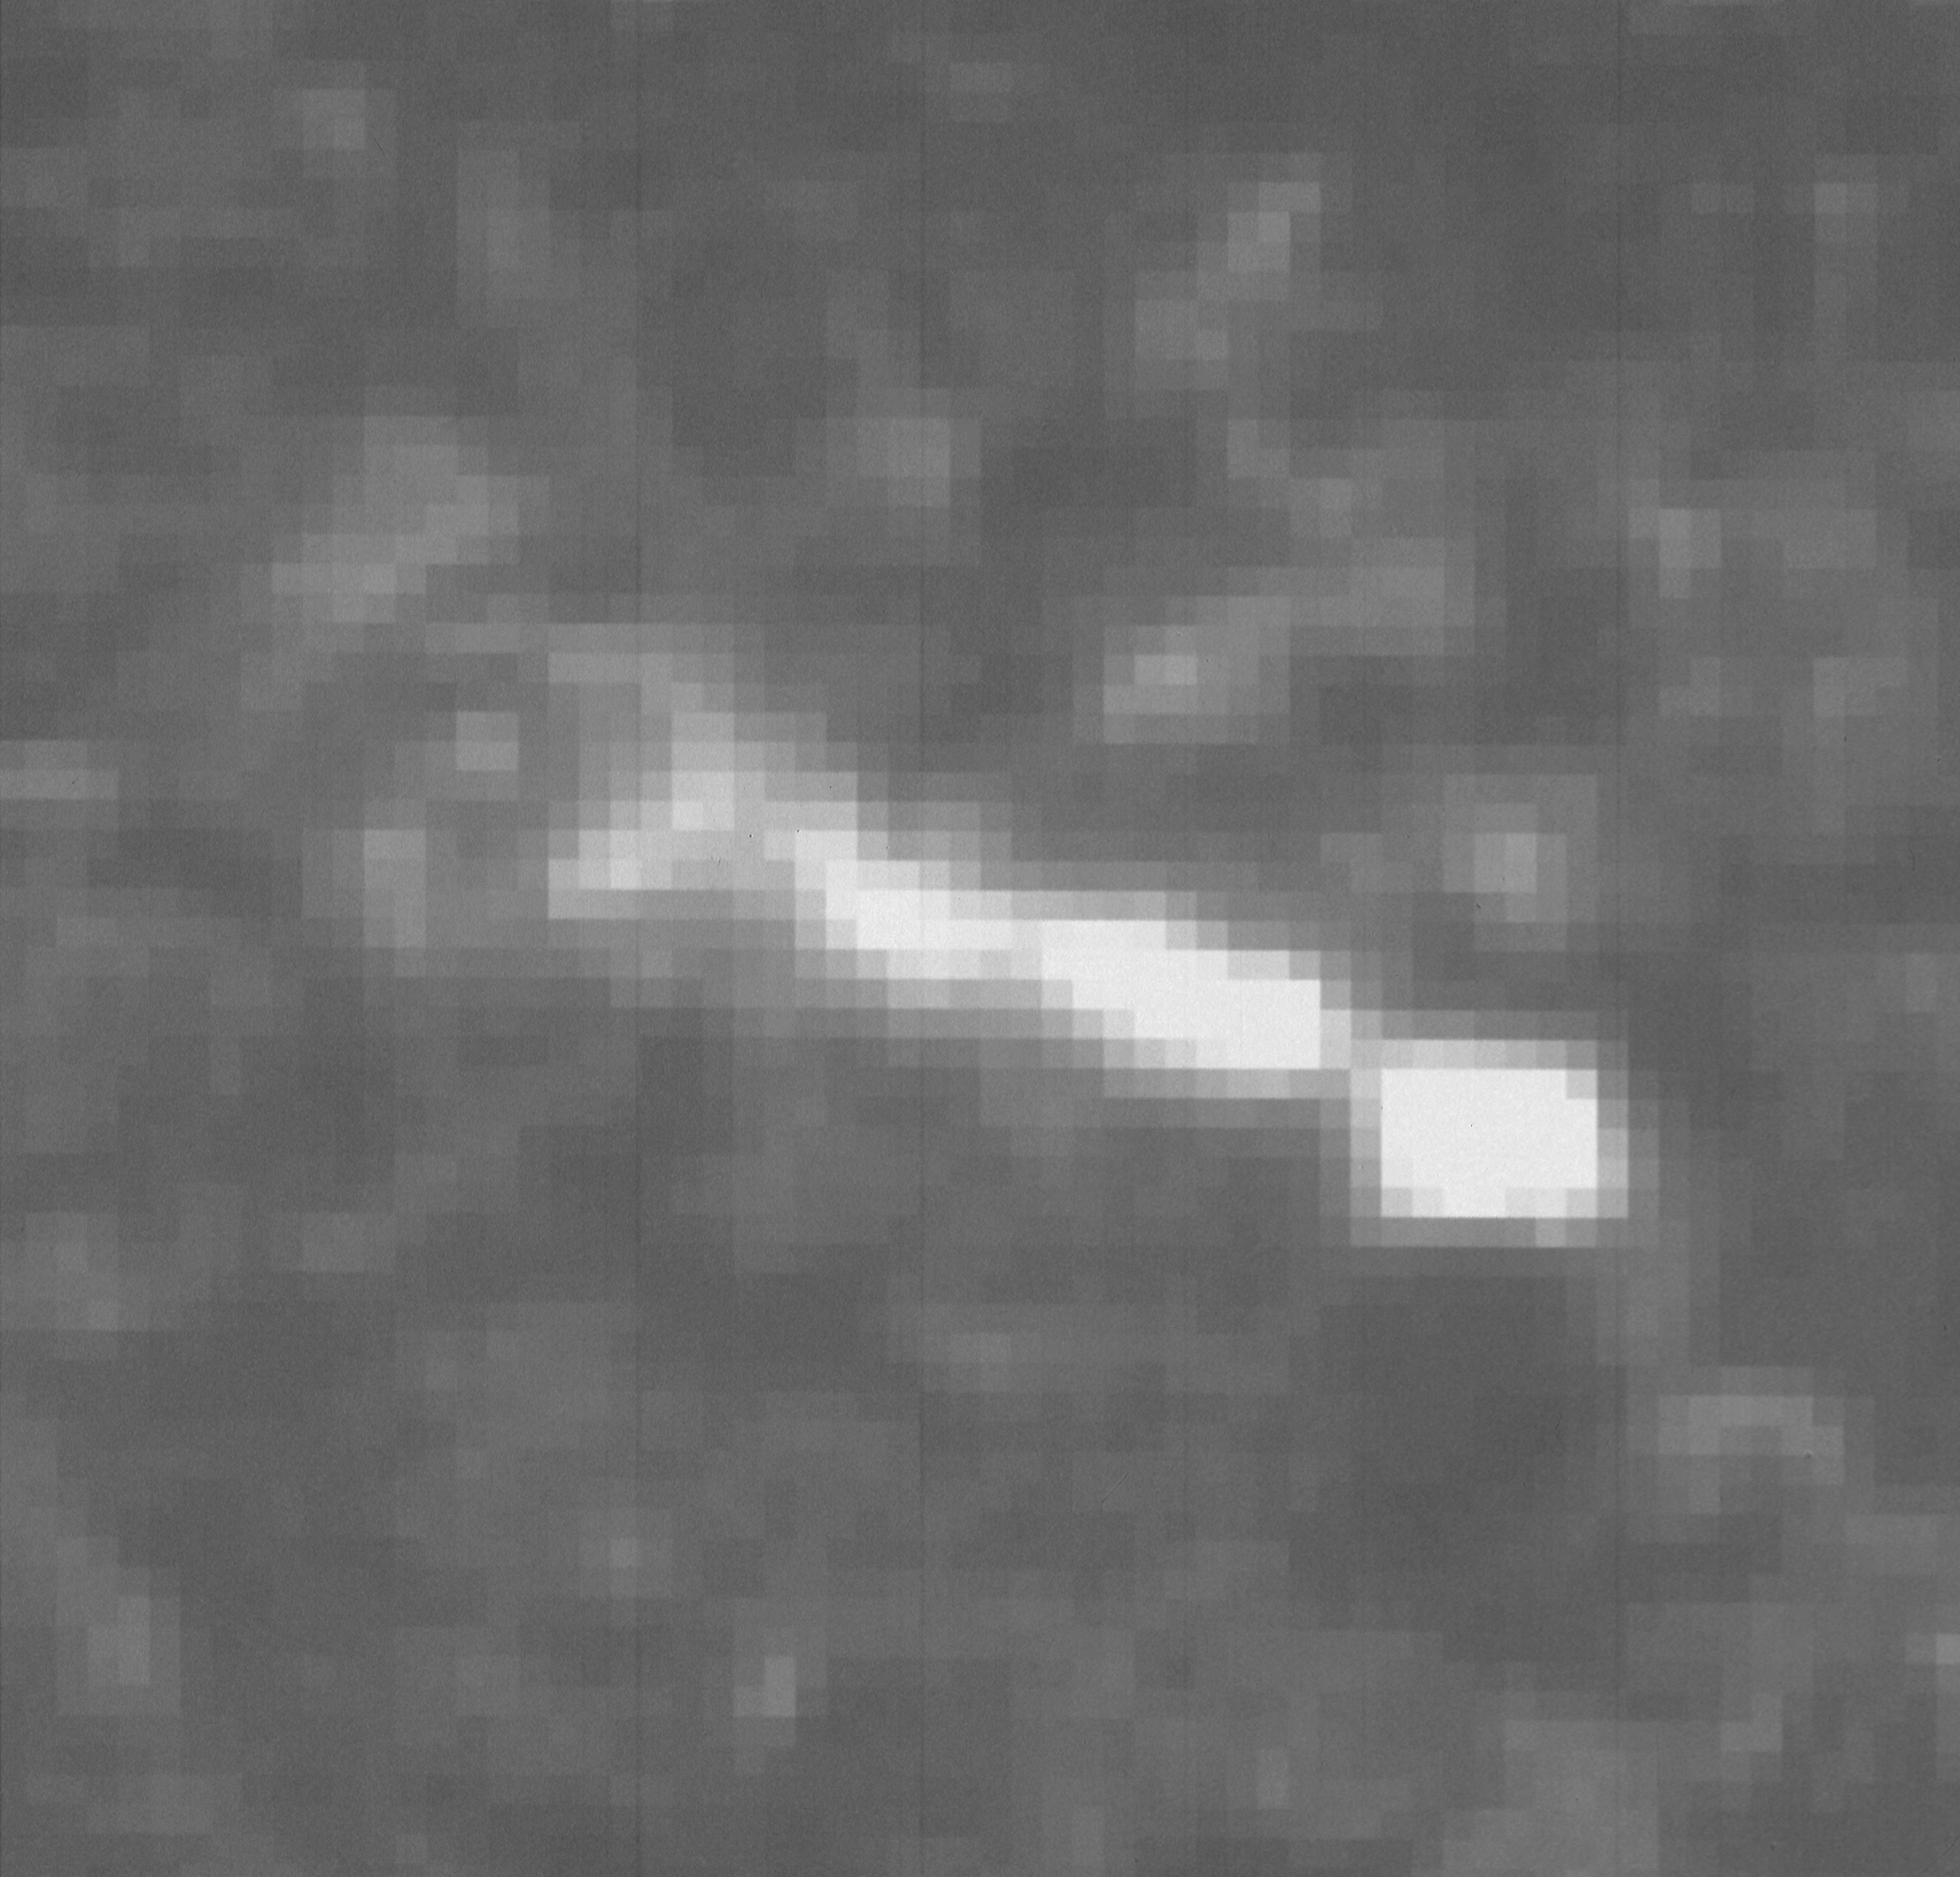

Optical jet in galaxy NGC 3862

A NASA/ESA Hubble Space Telescope image of the central region of the galaxy NGC 3862 reveals a jet-like feature previously unseen in optical wavelengths. The image was taken with the European Space Agency's Faint Object Camera in F196 mode at a wavelength of 3400 angstroms. The image's 0.06 arc second resolution reveals several knots and twists in the jet. The jet's full angular size is about 0.6 arc second, corresponding to a length of 740 light-years.

NGC 3862 is an elliptical galaxy in a rich cluster of galaxies known as Abell 1367, located at a distance of about 260 million light-years away in the constellation of Leo. This new type of jet suggests that astronomers are seeing a new and unexpected phenomena in galactic nuclei.

Credit: P. Crane (European Southern Observatory), and NASA/ESA